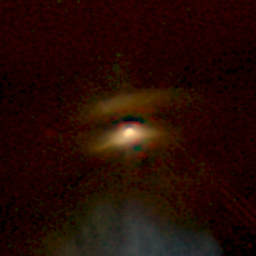

NICMOS Peers Through Dust to Reveal Young Stellar Disks. A View of Haro 6-5B

This image of the young star Haro 6-5B shows two bright regions separated by a dark lane. As seen in the WFPC2 image of the same object, the bright regions represent starlight reflecting from the upper and lower surfaces of the disk, which is thicker at its edges than its center. However, the infrared view reveals the young star just above the dust lane.

Credit: D. Padgett (IPAC/Caltech), W. Brandner (IPAC), K. Stapelfeldt (JPL) and NASA/ESA